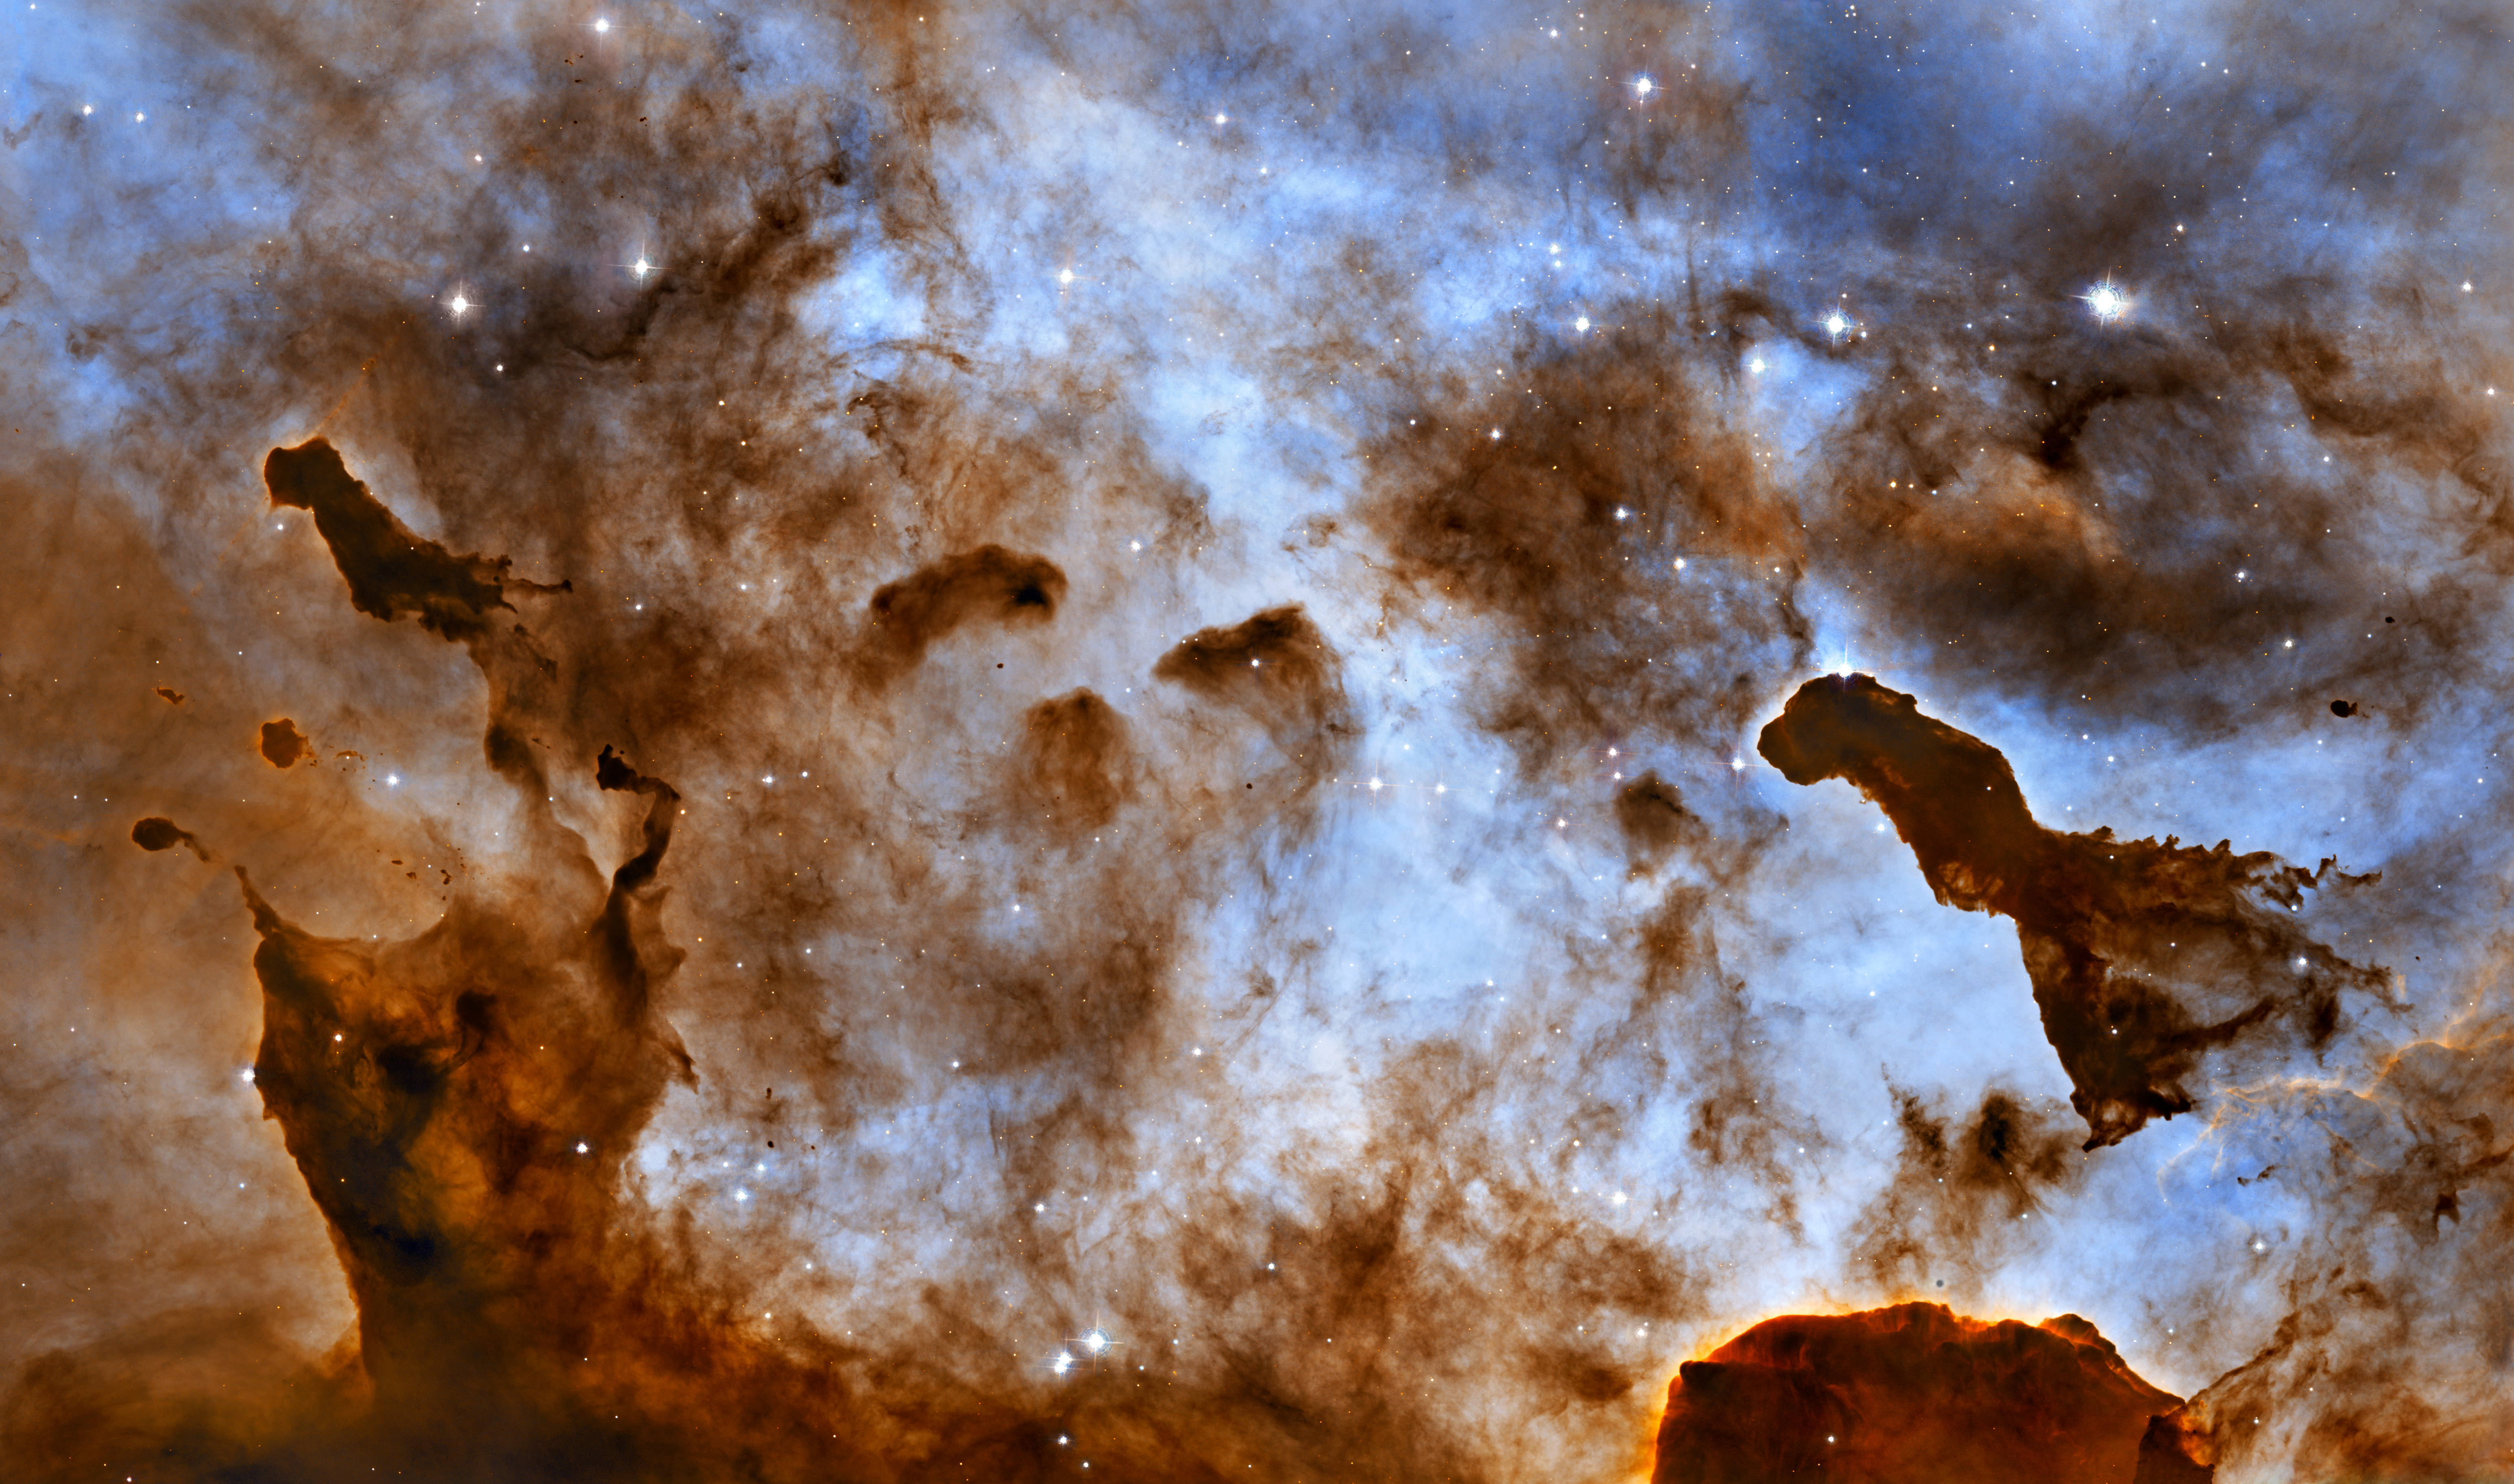

Cosmic ice sculptures: dust pillars in the Carina Nebula

Enjoying a frozen treat on a hot summer day can leave a sticky mess as it melts in the Sun and deforms. In the cold vacuum of space, there is no edible ice cream, but there is radiation from massive stars that is carving away at cold molecular clouds, creating bizarre, fantasy-like structures.

These one-light-year-tall pillars of cold hydrogen and dust, imaged by the Hubble Space Telescope, are located in the Carina Nebula. Violent stellar winds and powerful radiation from massive stars are sculpting the surrounding nebula. Inside the dense structures, new stars may be born.

This image of dust pillars in the Carina Nebula is a composite of 2005 observations taken of the region in hydrogen light (light emitted by hydrogen atoms) along with 2010 observations taken in oxygen light (light emitted by oxygen atoms), both times with Hubble's Advanced Camera for Surveys. The immense Carina Nebula is an estimated 7,500 light-years away in the southern constellation Carina.

Credit: NASA, ESA, and the Hubble Heritage Project (STScI/AURA). Acknowledgment: M. Livio (STScI) and N. Smith (University of California, Berkeley, USA)